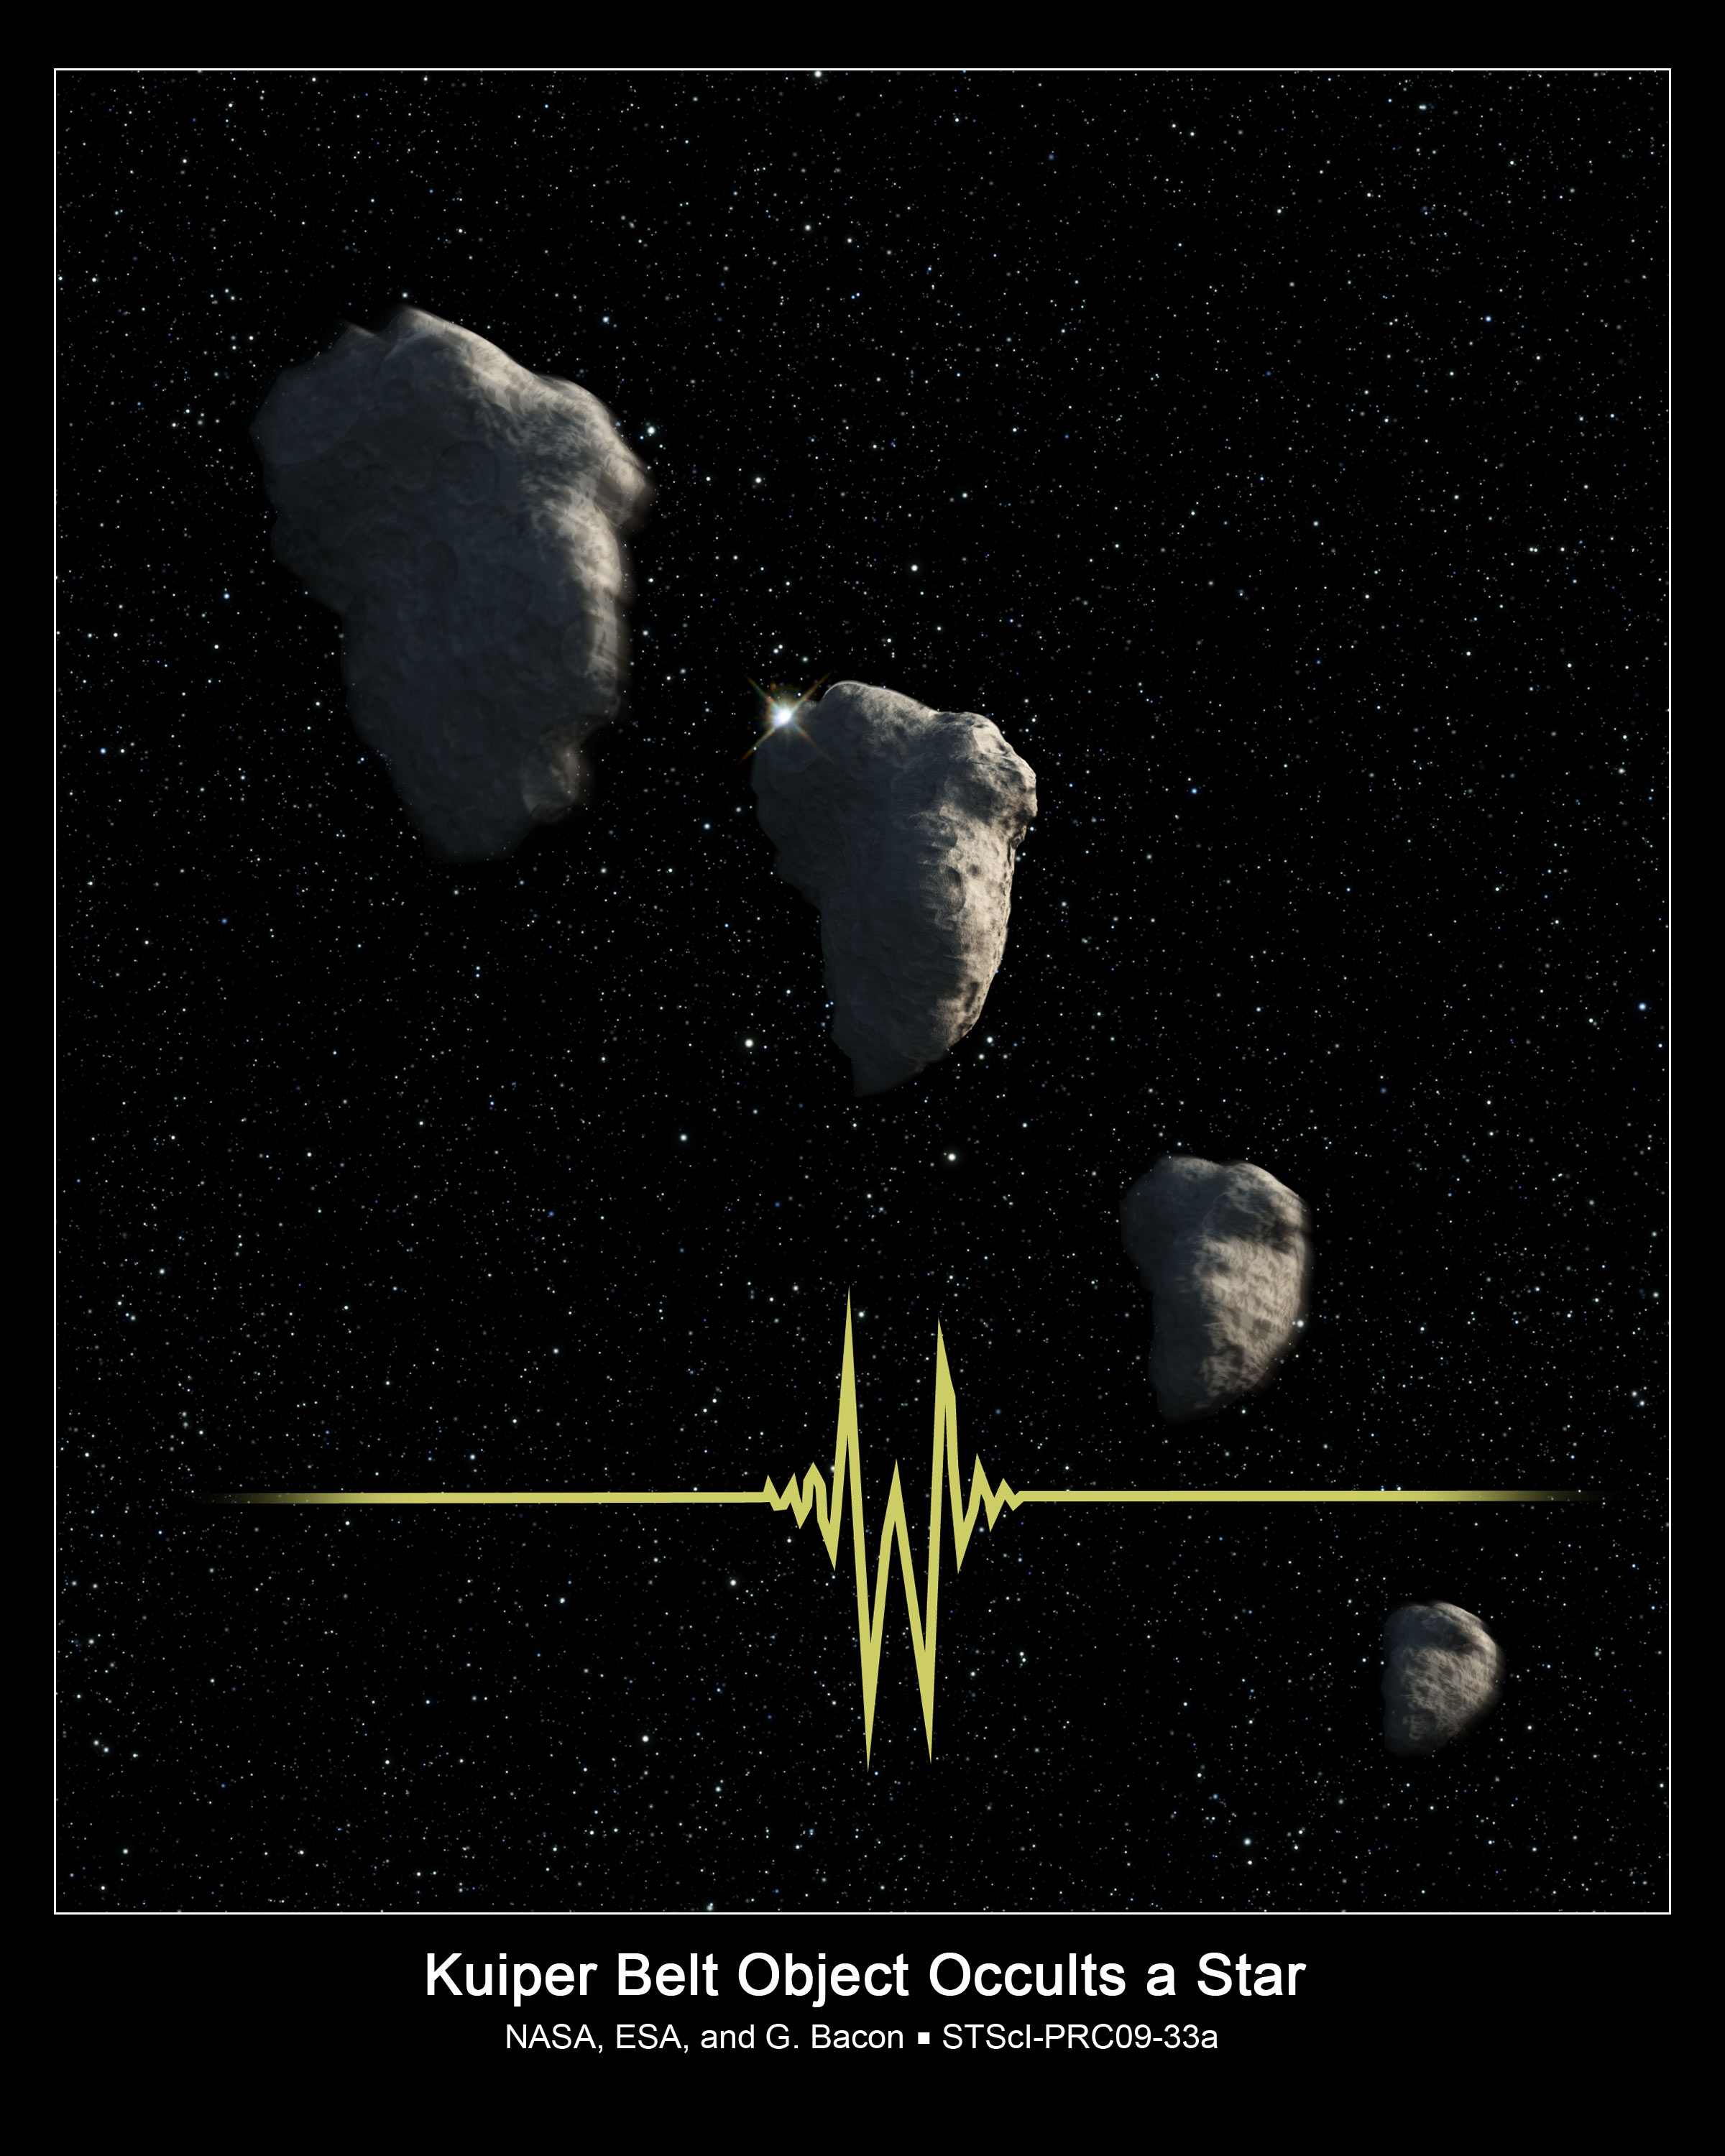

Kuiper Belt Object occults star

This is an artist's impression of a small Kuiper Belt Object (KBO) occulting a star. NASA/ESA Hubble Space Telescope recorded this brief event and allowed astronomers to determine that the KBO was only about 800 metres across, setting a new record for the smallest object ever seen in the Kuiper Belt.

Credit: NASA, ESA, and G. Bacon (STScI)